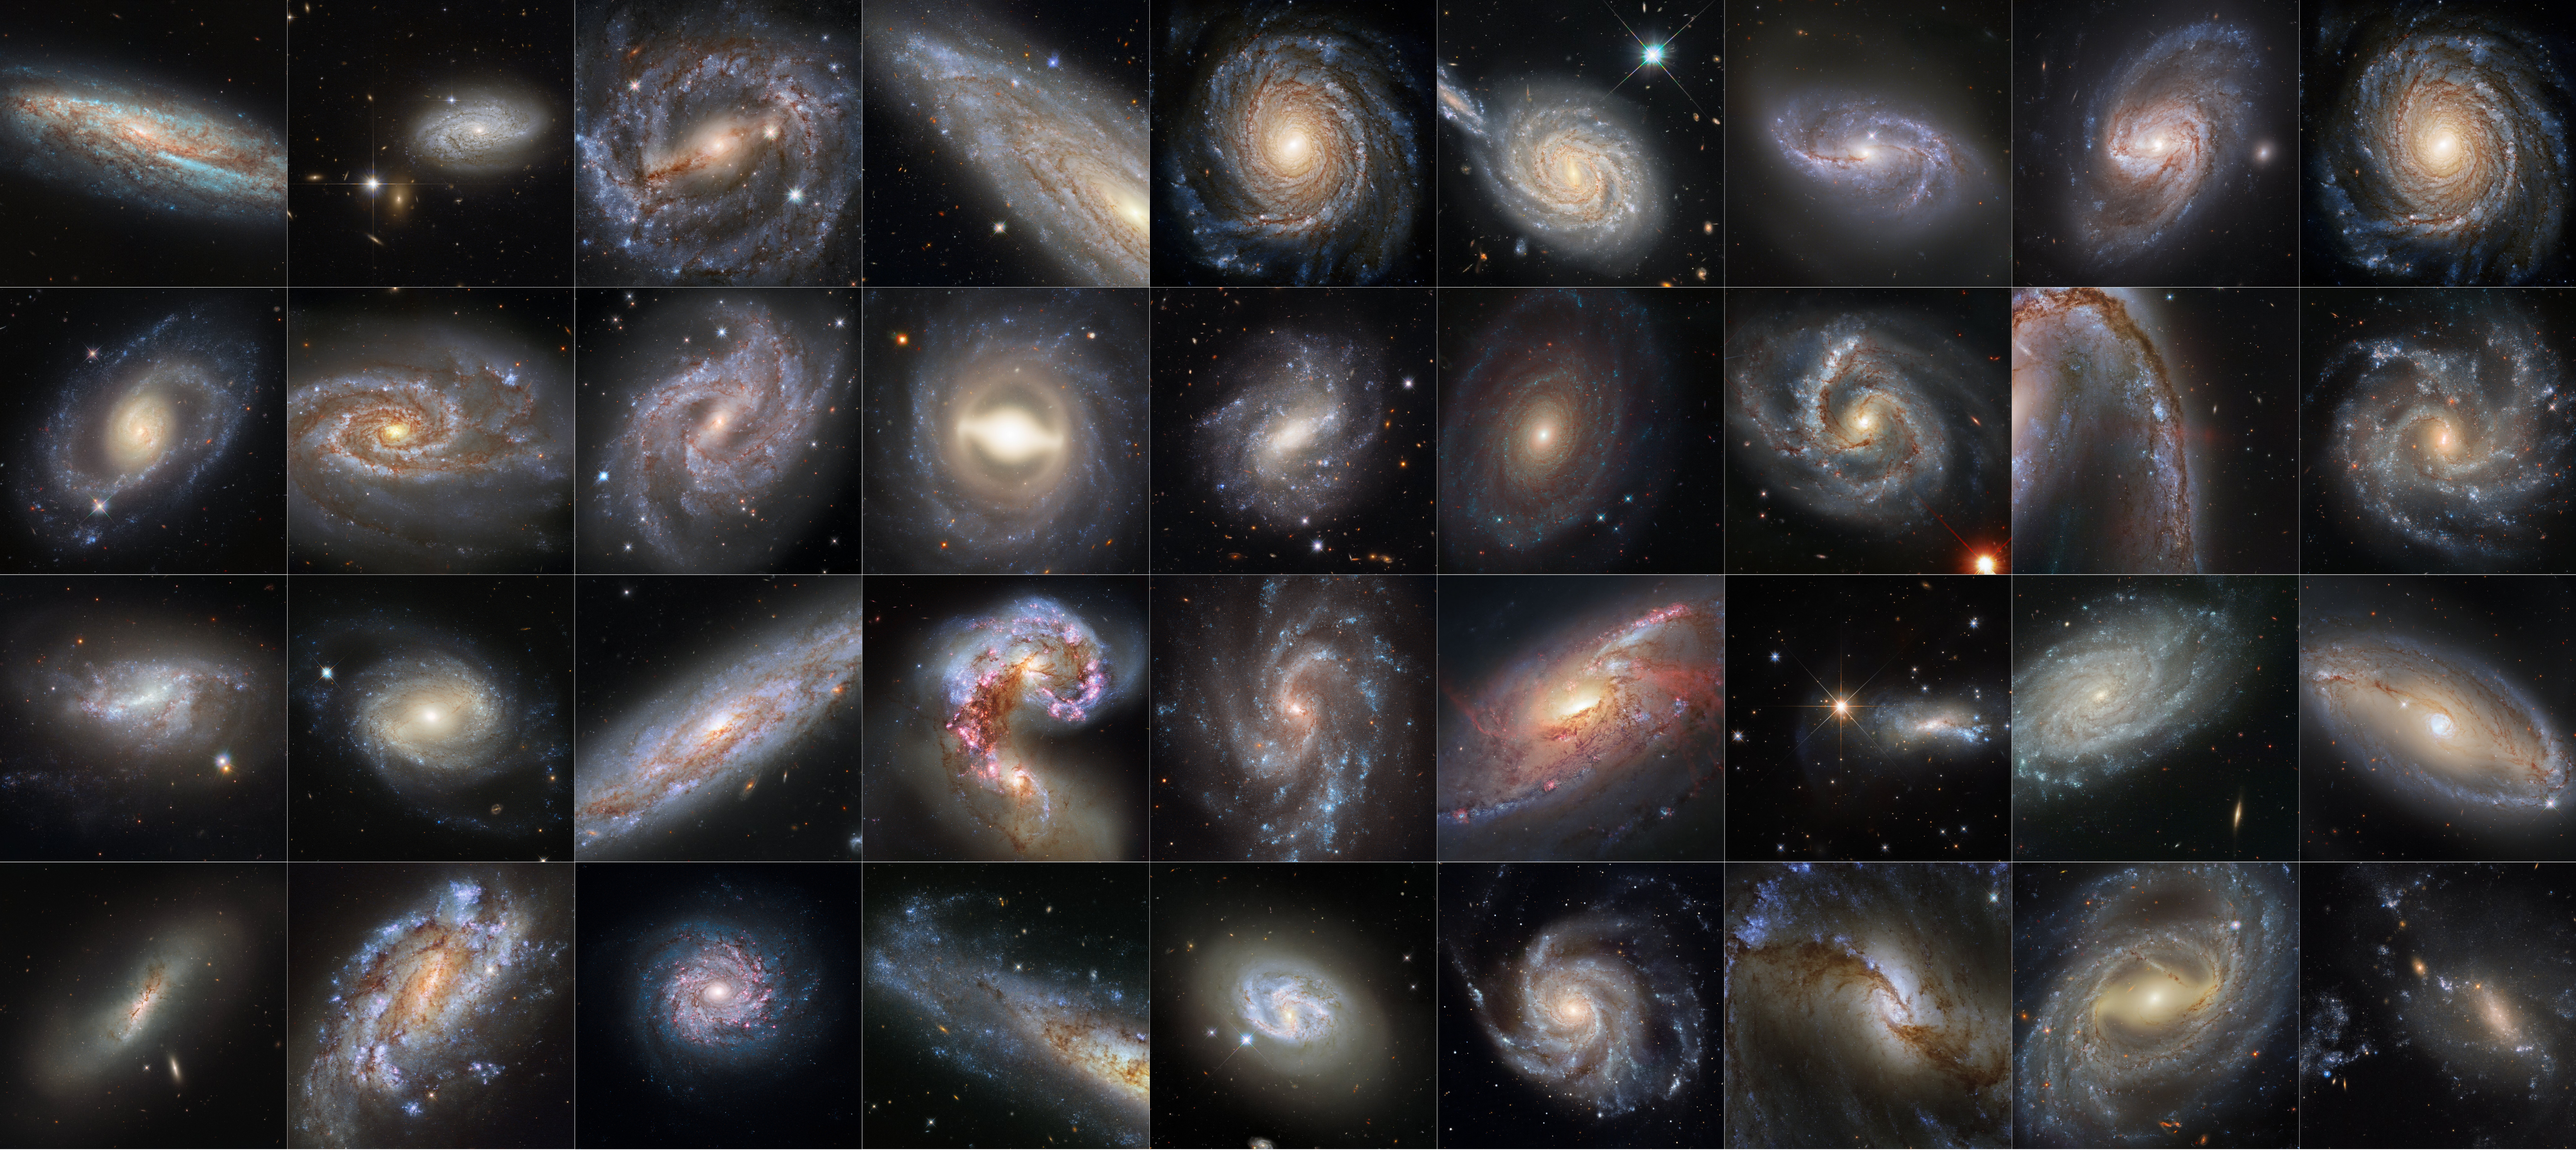

A Dazzling Hubble Collection of Supernova Host Galaxies

Spanning from 2003 to 2021, this collection of images from the NASA/ESA Hubble Space Telescope features galaxies that are all hosts to both Cepheid variables and supernovae. These two celestial phenomena are both crucial tools used by astronomers to determine astronomical distance, and have been used to refine our measurement of Hubble’s constant, the expansion rate of the Universe.

Credit: NASA, ESA